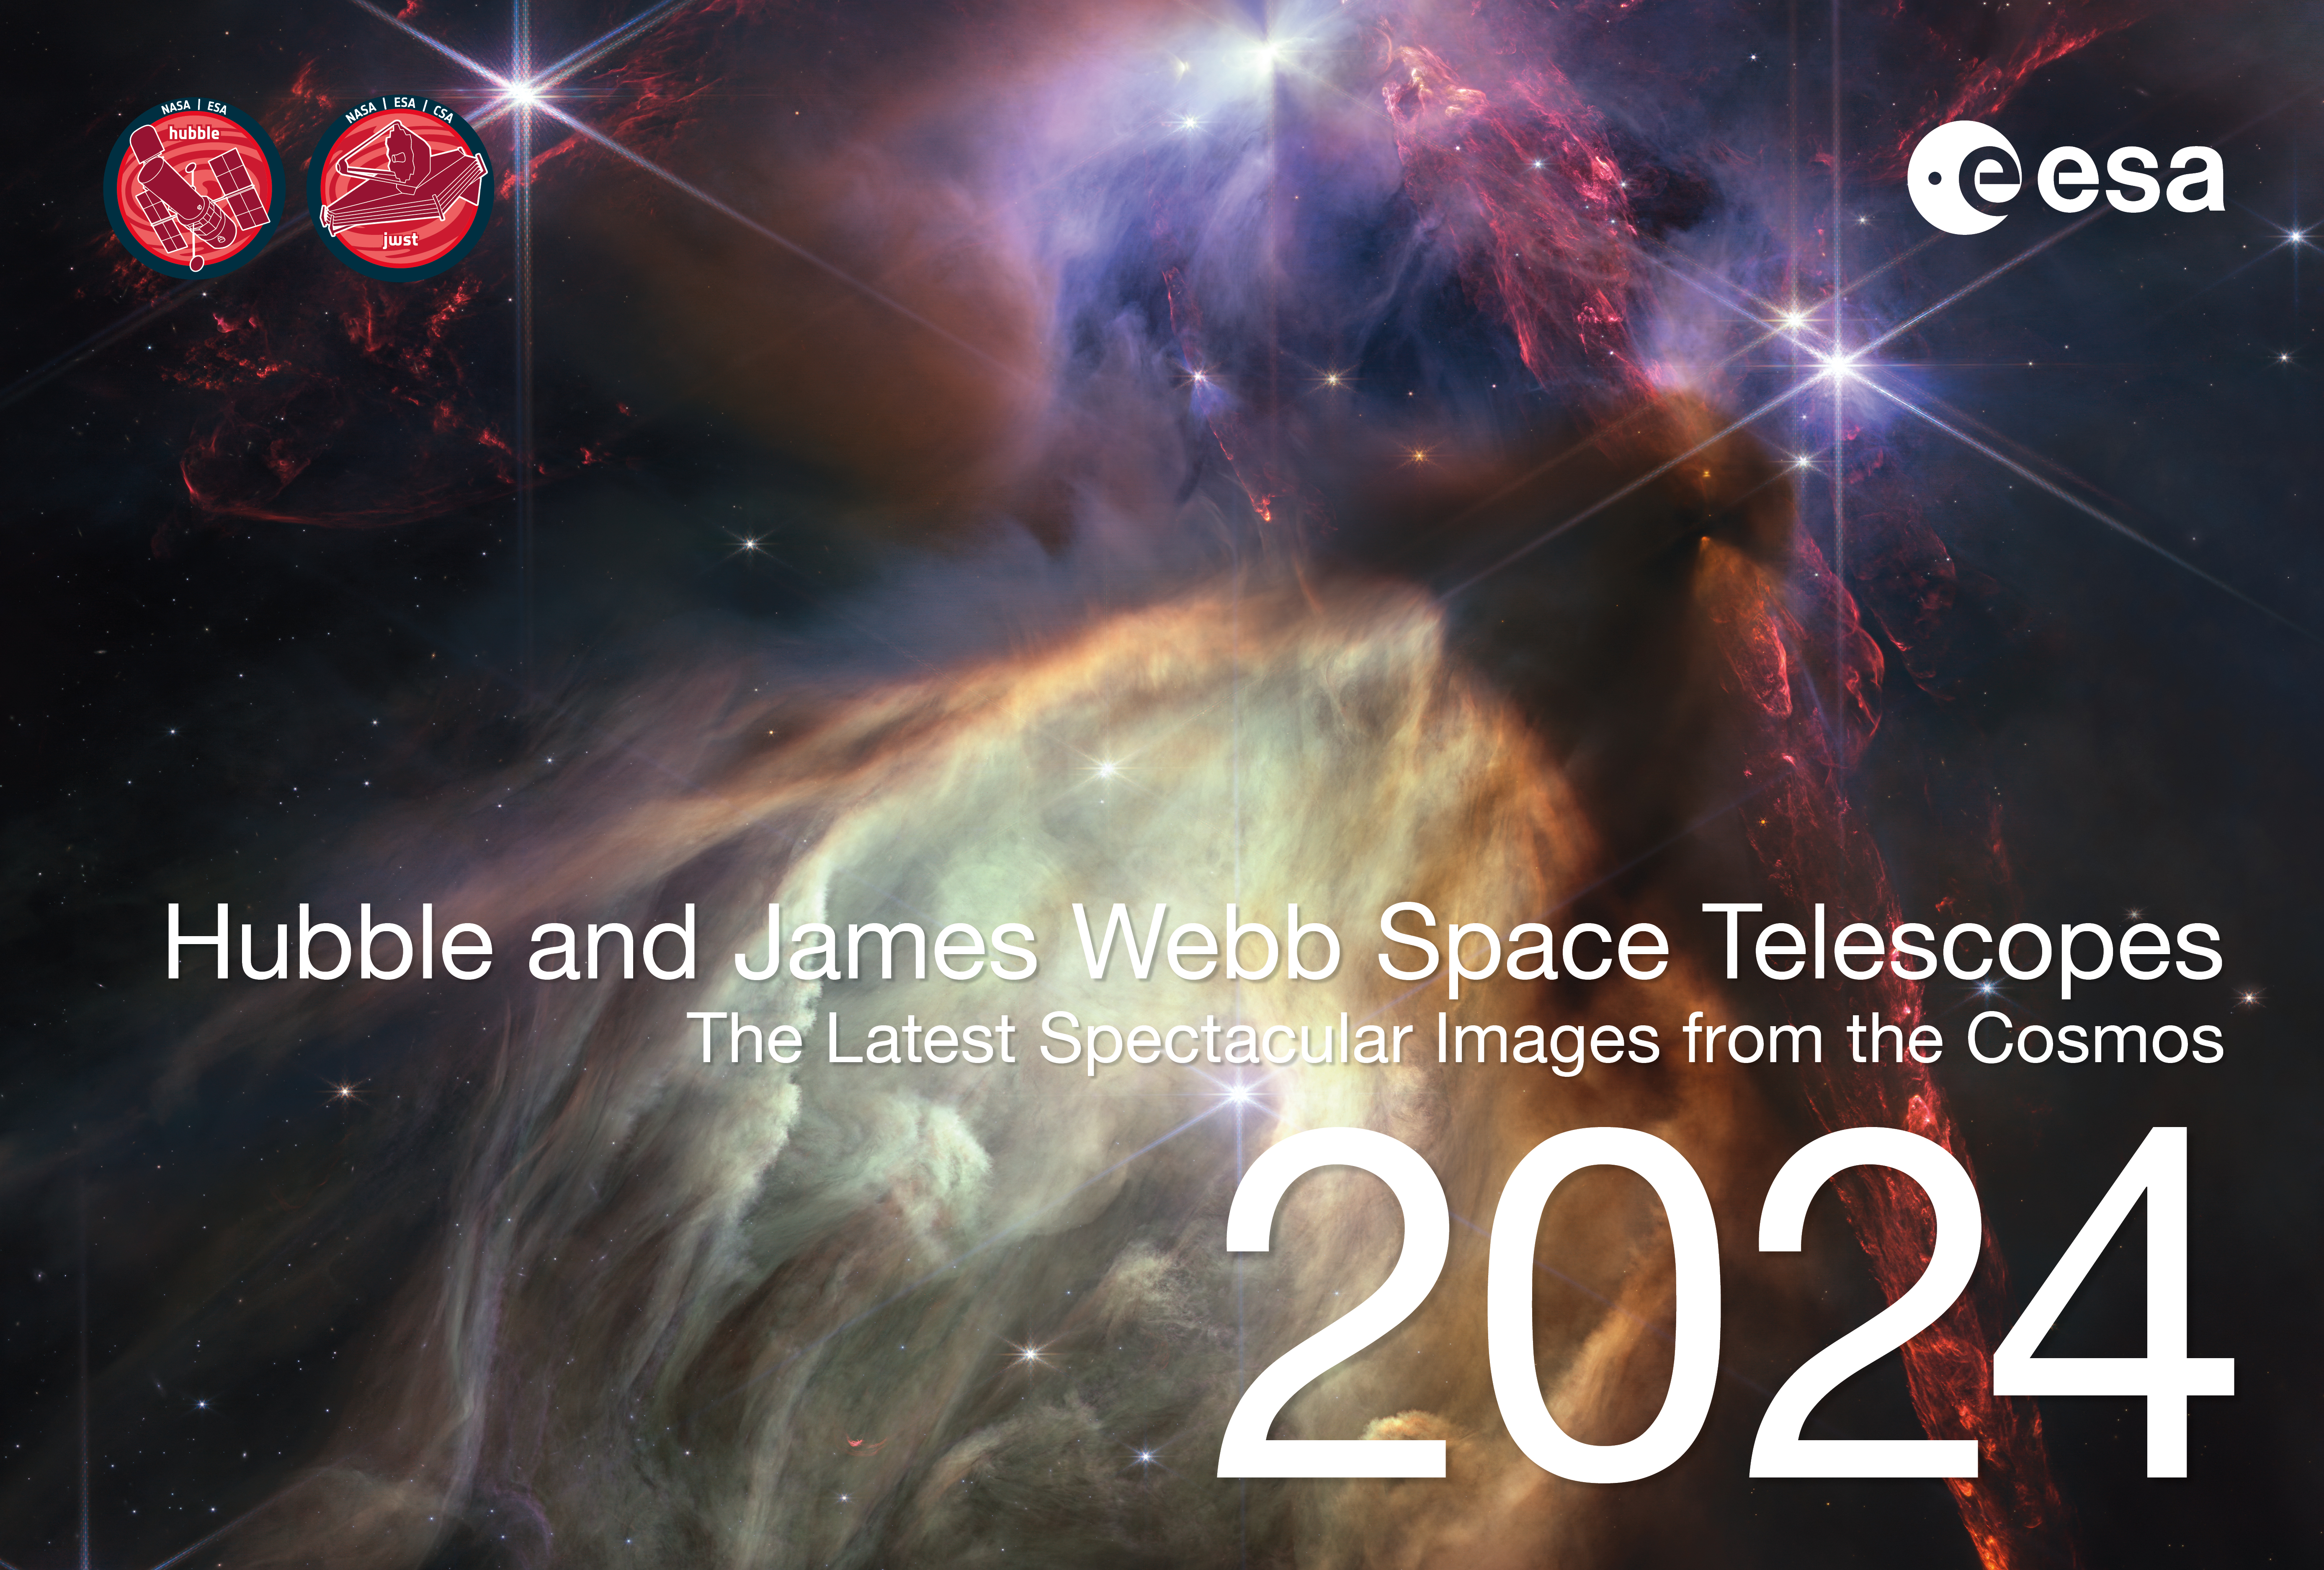

Cover page of the 2024 ESA/Hubble and ESA/Webb calendar

This is the cover page for the 2024 ESA/Hubble and ESA/Webb Calendar, featuring images released in 2023. The electronic version of the calendar is available in digital (low and high resolution) and print-ready versions for everyone to share and enjoy.

Credit: ESA/Hubble, ESA/Webb